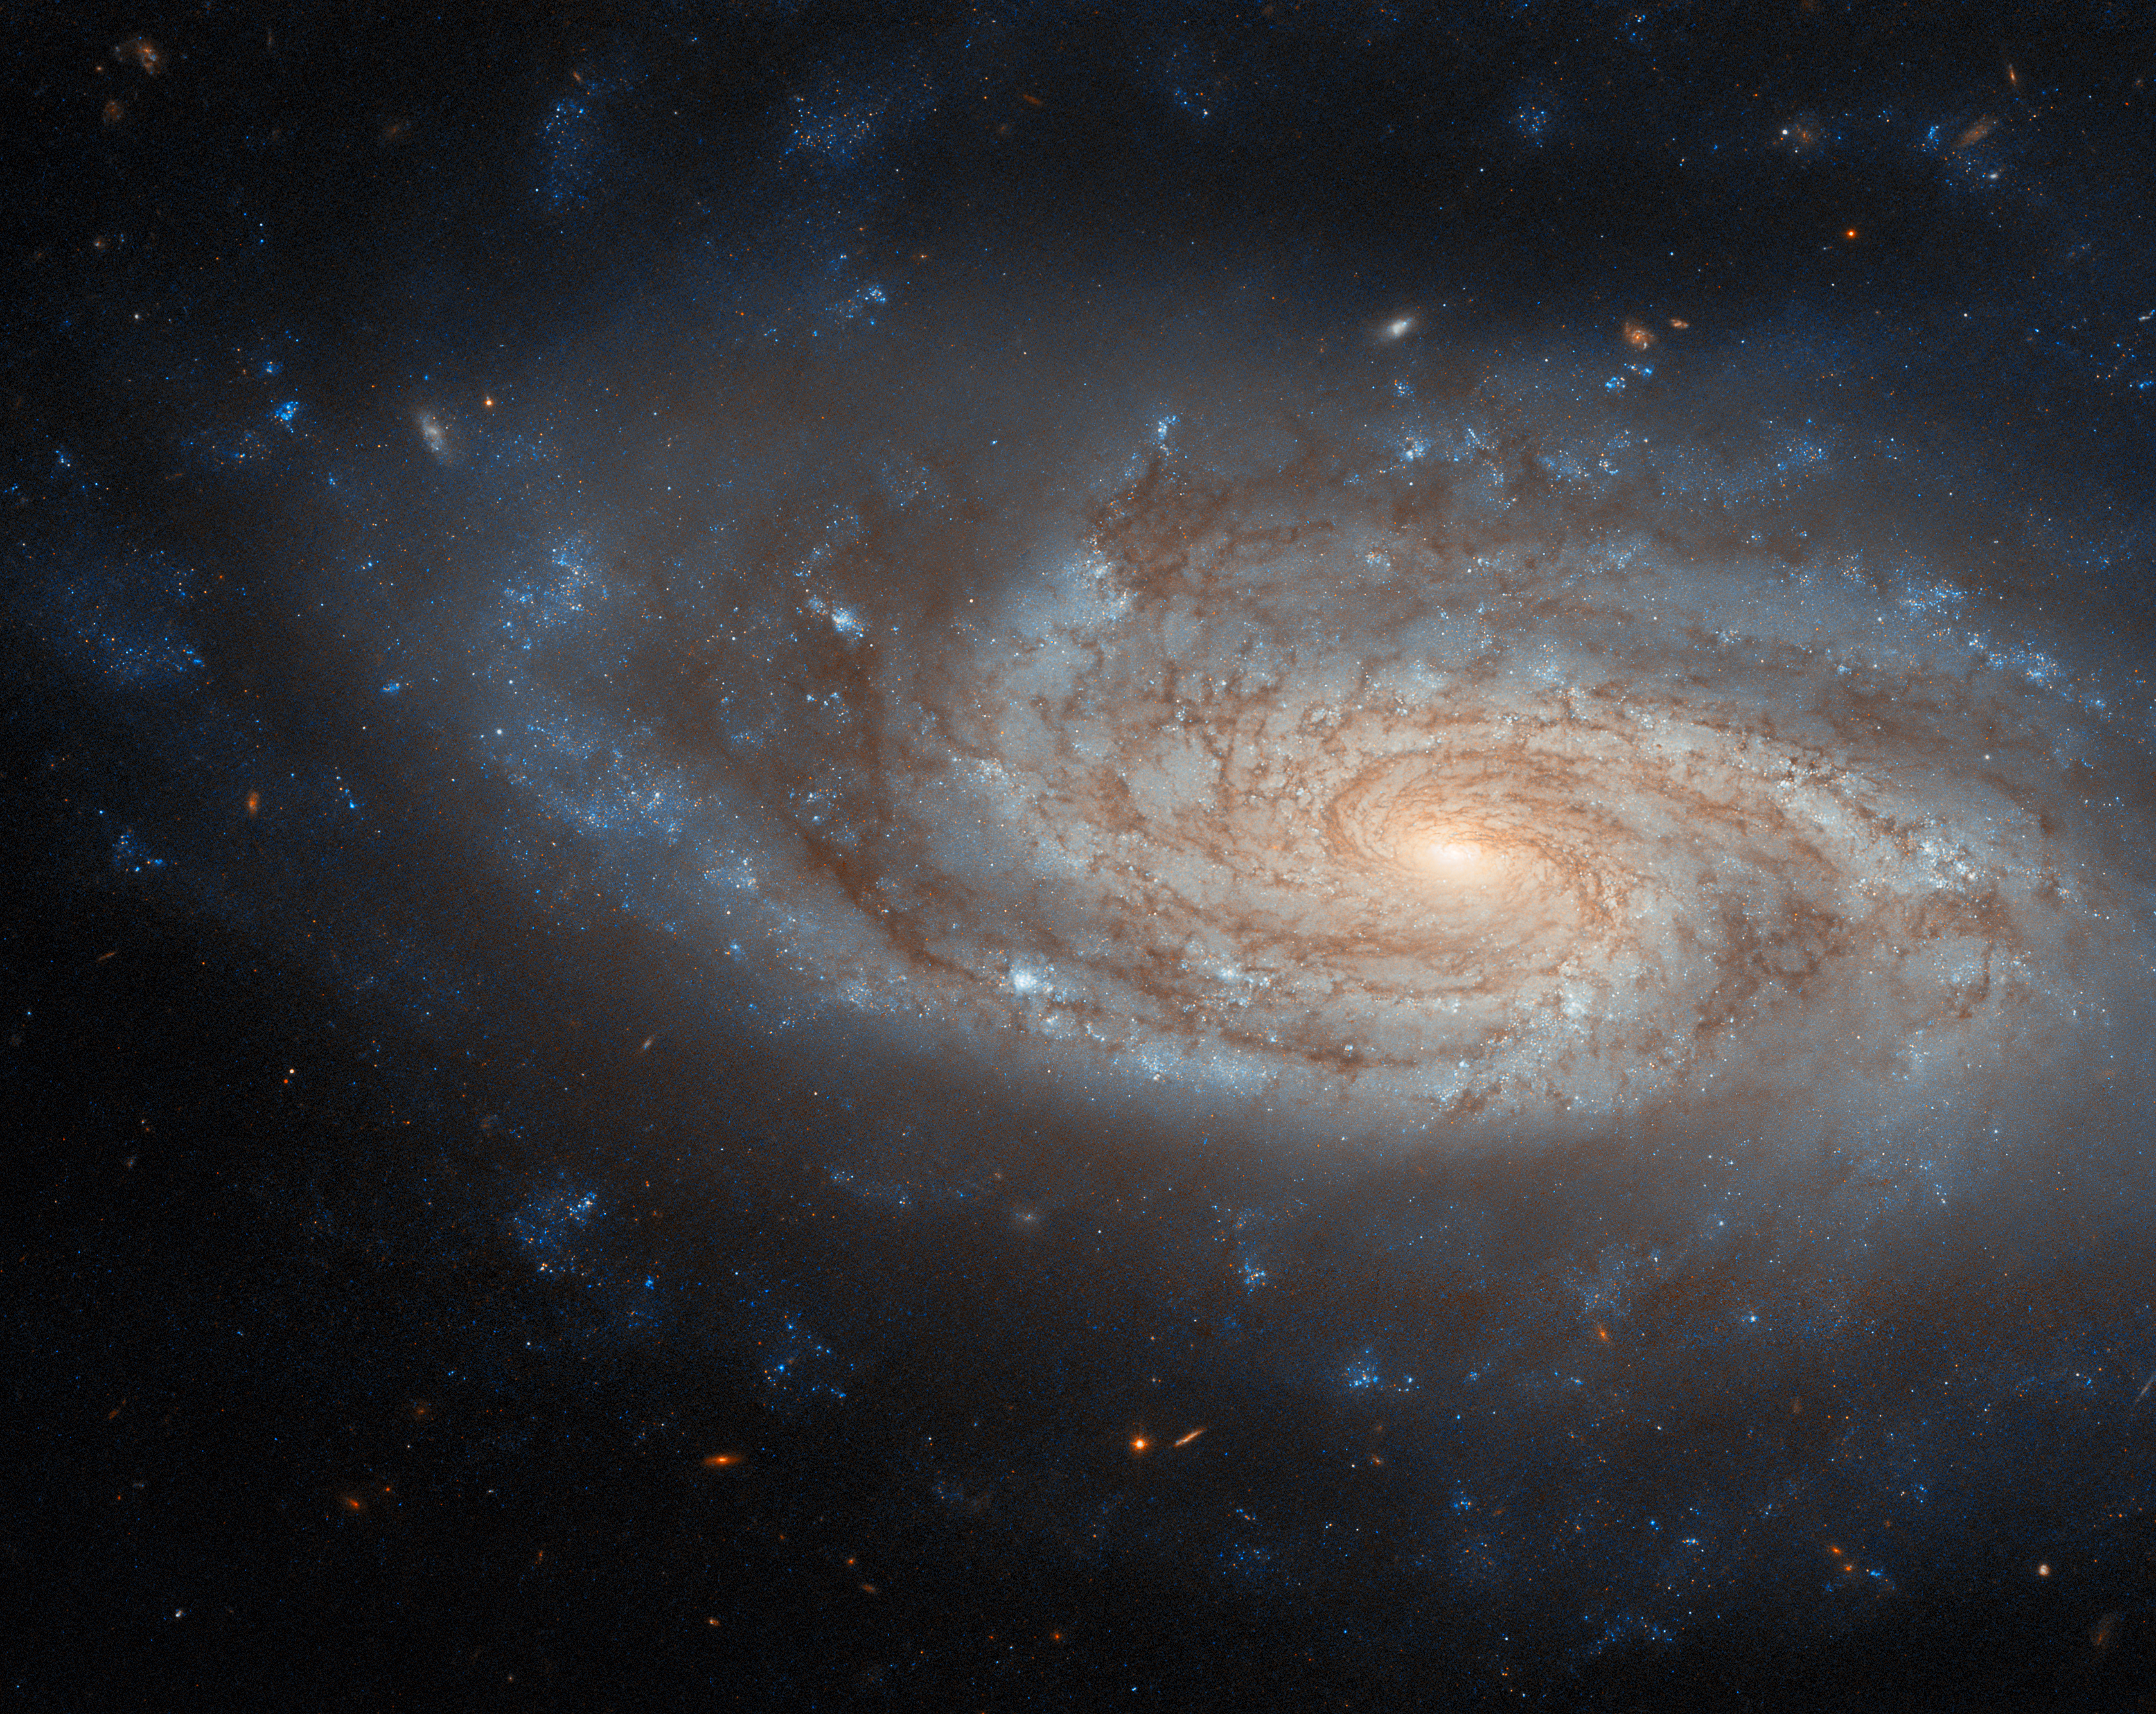

An island universe

In this week’s Hubble Picture of the Week we are treated to a wonderfully detailed snapshot of NGC 3430. A spiral galaxy, it lies 100 million light-years from Earth in the constellation Leo Minor. Several other galaxies are located relatively nearby to this one, just out of frame; one is close enough that gravitational interaction is driving some star formation in NGC 3430.

That NGC 3430 is such a fine example of a galactic spiral may be why it ended up as part of the sample that Edwin Hubble used to define his classification of galaxies. Namesake of the Hubble Space Telescope, in 1926 he authored a paper which classified some four hundred galaxies by their appearance — as either spiral, barred spiral, lenticular, elliptical or irregular. This straightforward typology proved immensely influential, and the modern, more detailed schemes that astronomers use today are still based on it. NGC 3430 itself is an SAc galaxy, a spiral lacking a central bar with open, clearly-defined arms.

At the time of Hubble’s paper, the study of galaxies in their own right was in its infancy. With the benefit of Henrietta Leavitt’s work on Cepheid variable stars, Hubble had only a couple of years before settled the debate about whether these ‘nebulae’, as they were called then, were situated within our galaxy or were distant and independent. He himself referred to ‘extragalactic nebulae’ in his paper, indicating that they lay beyond the Milky Way galaxy. Once it became clear that these distant objects were very different from actual nebulae, the favoured term for a while was the quite poetic ‘island universe’. While NGC 3430 may look as if it still deserves this moniker, today we simply call it and the objects like it a ‘galaxy’.

Credit: ESA/Hubble & NASA, C. Kilpatrick